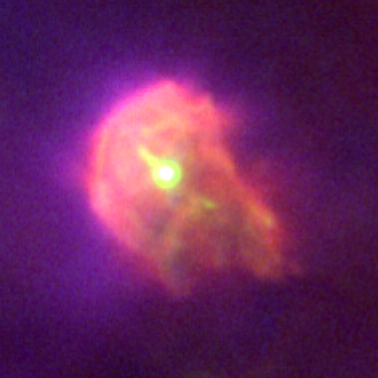

Proplyd in the Orion Nebula

Planet formation is a hazardous process. These four snapshots, taken by NASA/ESA Hubble Space Telescope, show dust disks around embryonic stars in the Orion Nebula being 'blowtorched' by a blistering flood of ultraviolet radiation from the region's brightest star. Within these disks are the seeds of planets. The doomed systems look like hapless comets, with wayward tails of gas boiling off the withering, pancake-shaped disks.

Credit: NASA/ESA, J. Bally (University of Colorado, Boulder, CO), H. Throop (Southwest Research Institute, Boulder, CO), C.R. O'Dell (Vanderbilt University, Nashville, TN)